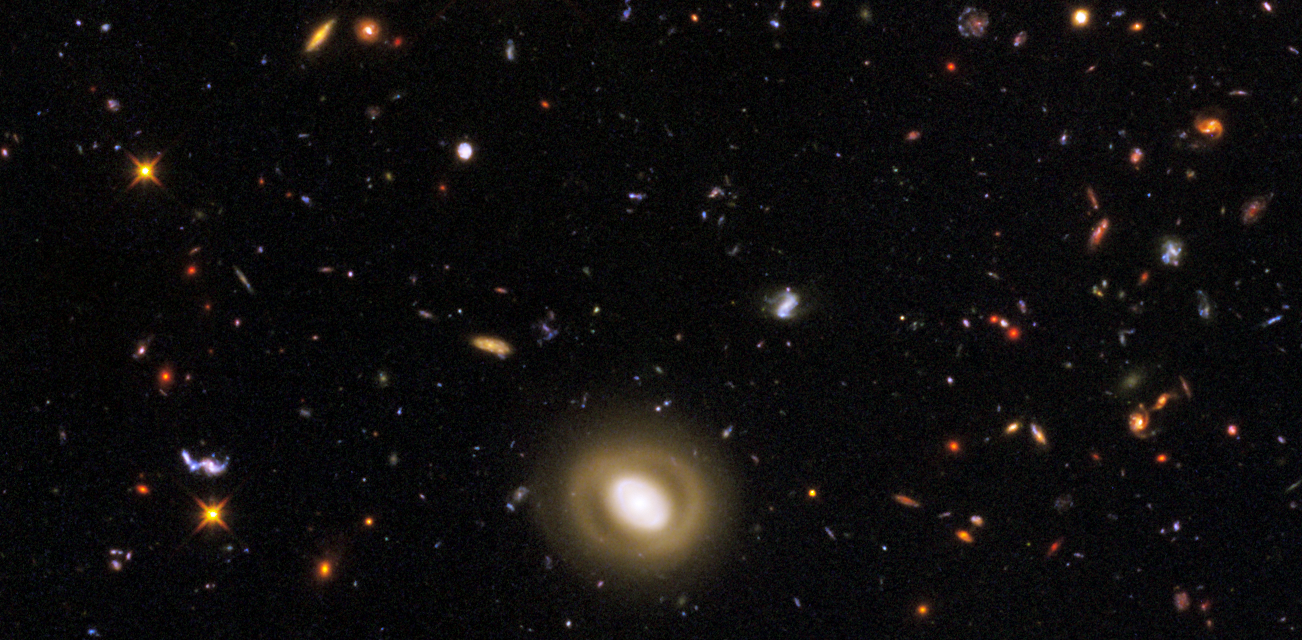

GOODS South WFC3 ERS Details 2

This image, taken by NASA's Hubble Space Telescope, was made from mosaics taken in September and October 2009 with the newly installed Wide Field Camera 3 (WFC3) and in 2004 with the Advanced Camera for Surveys (ACS).

Credit: NASA, ESA, R. Windhorst, S. Cohen, M. Mechtley, and M. Rutkowski (Arizona State University, Tempe), R. O'Connell (University of Virginia), P. McCarthy (Carnegie Observatories), N. Hathi (University of California, Riverside), R. Ryan (University of California, Davis), H. Yan (Ohio State University) and A. Koekemoer (Space Telescope Science Institute)